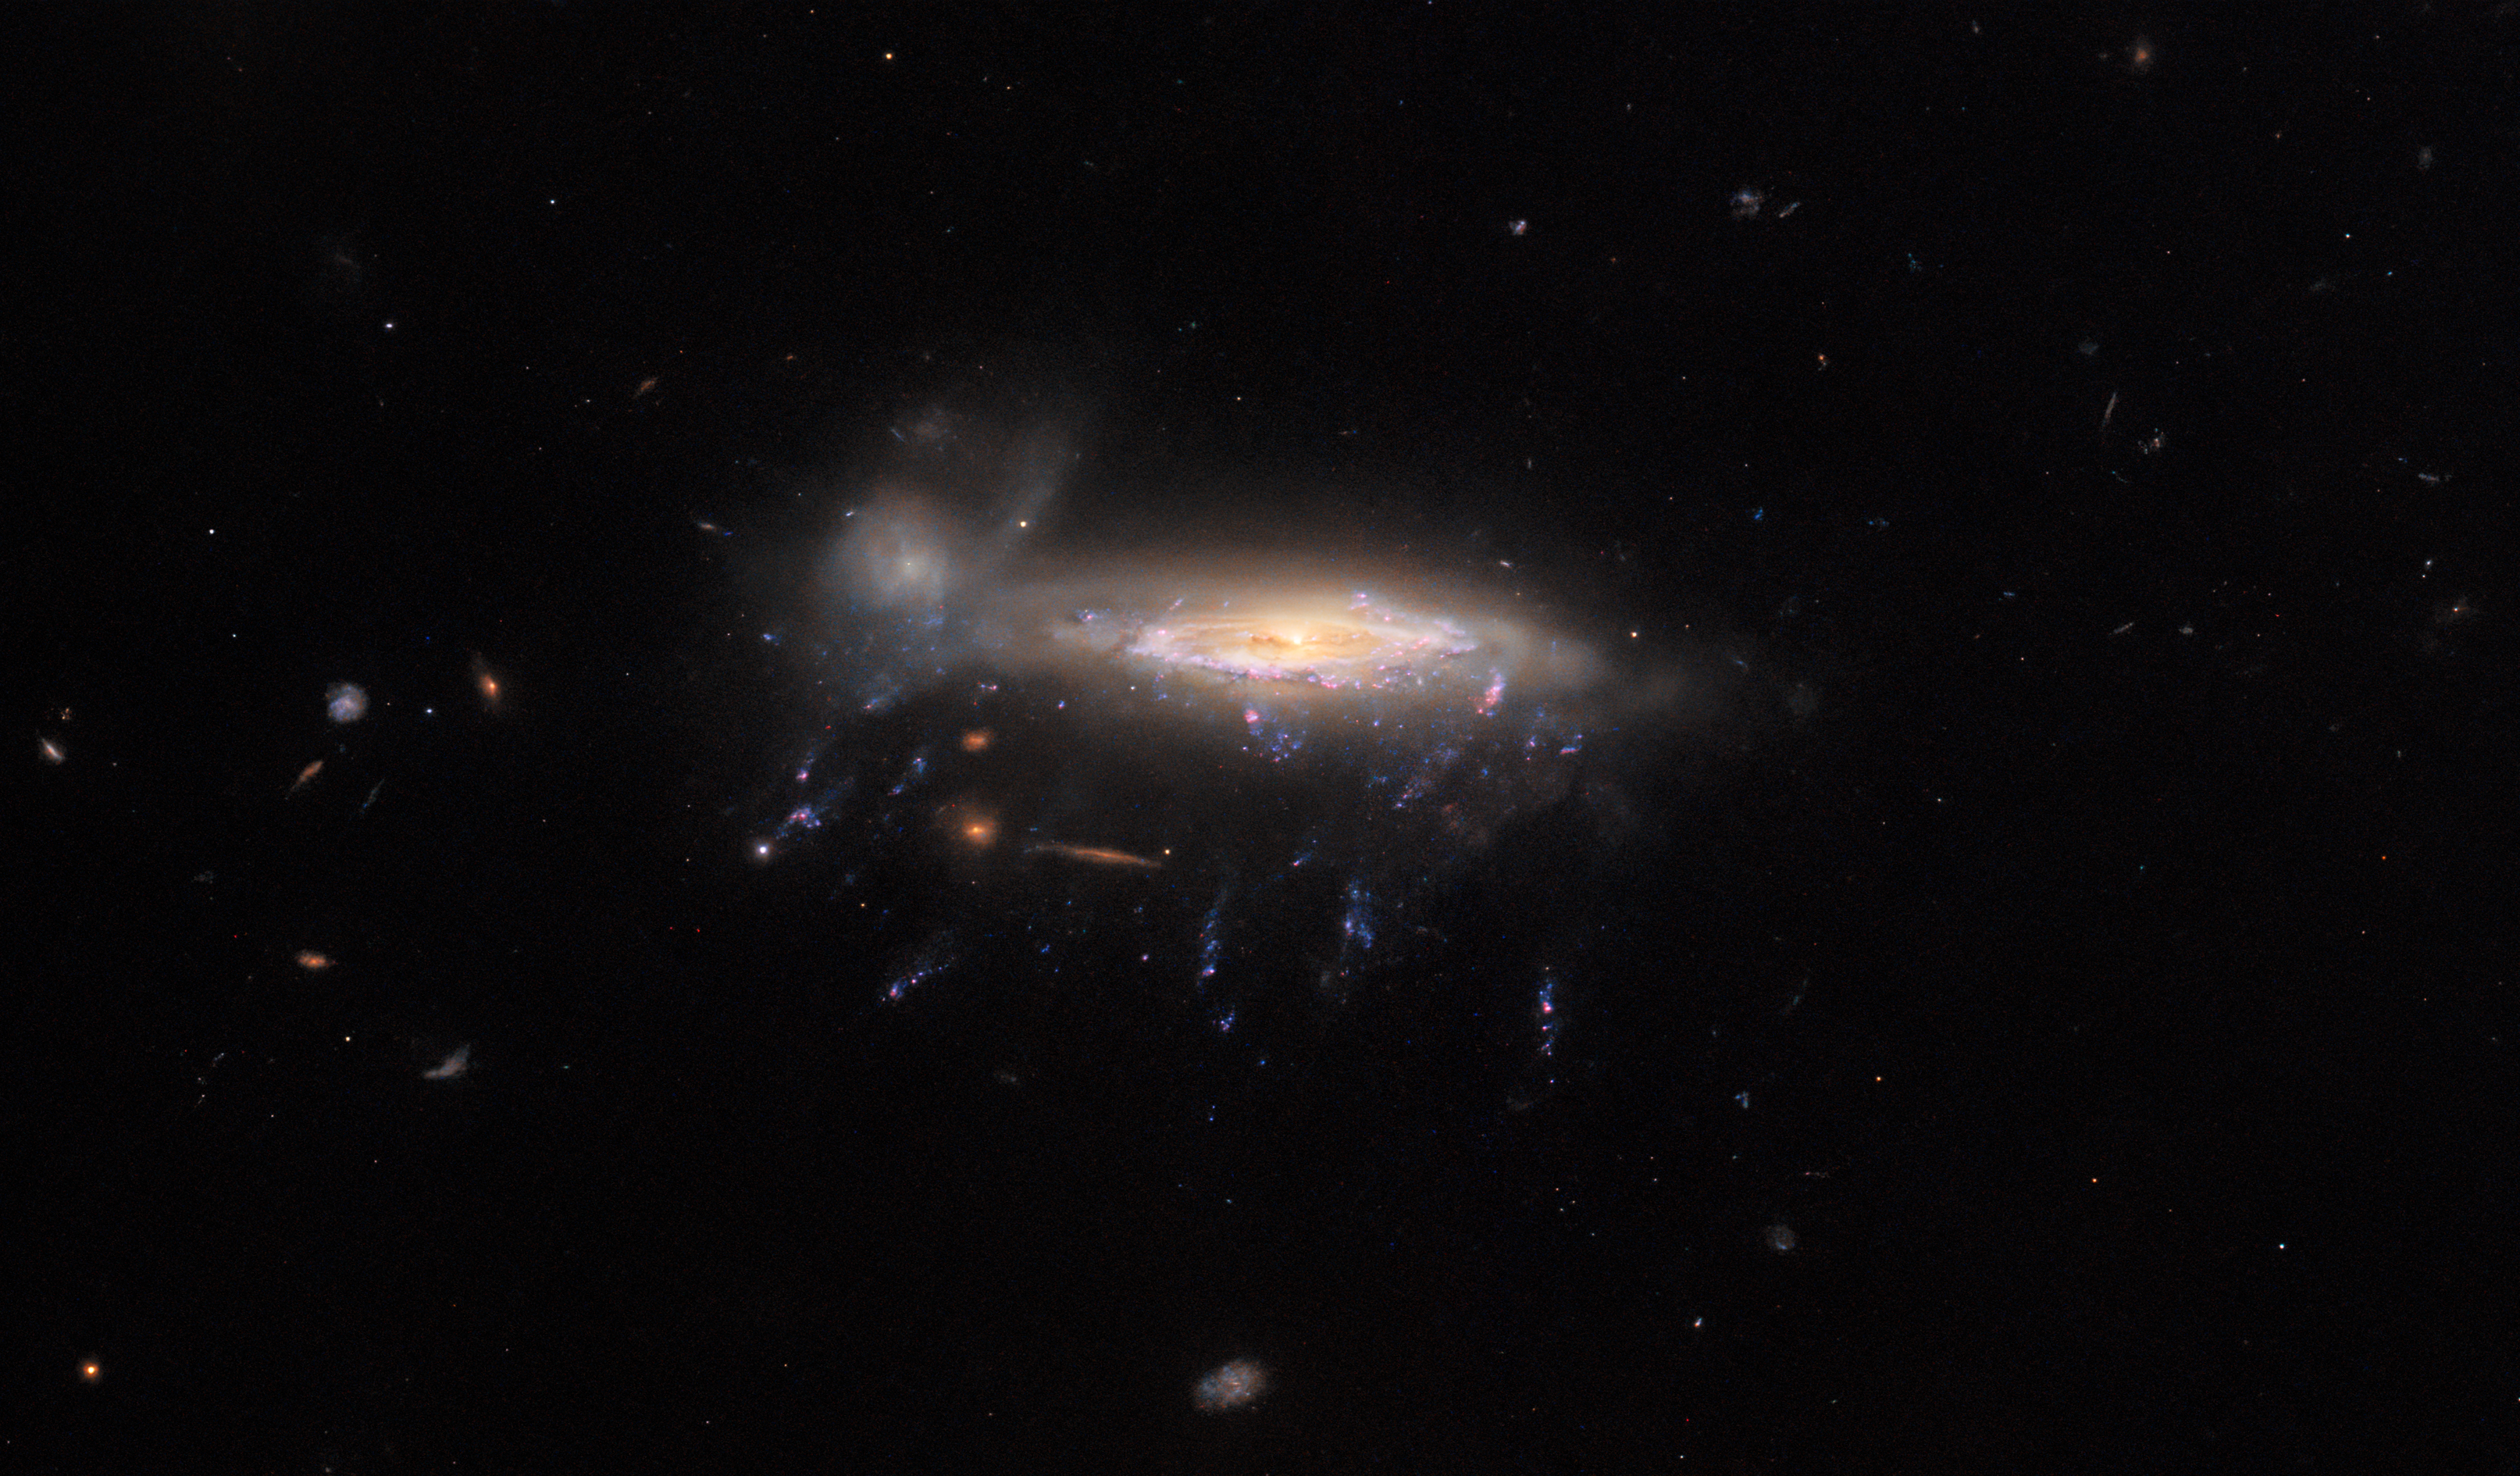

A jellyfish and the ram

Here we see JO204, a ‘jellyfish galaxy’ so named for the bright tendrils of gas that appear in this image to be drifting lazily below JO204’s bright central bulk. The galaxy lies almost 600 million light-years away in the constellation Sextans. This image was captured by the NASA/ESA Hubble Space Telescope, and it is the third of a series of Pictures of the Week featuring jellyfish galaxies. This series of images is possible thanks to a survey in which observations were made of six of these fascinating galaxies, including JO204. This survey was performed with the intention of better understanding star formation under extreme conditions.

Given the dreamy appearance of this image, it would be understandable to wonder why jellyfish galaxies should be such a crucible for star formation. The answer is that — as is often the case with astronomy — first appearances can be deceiving. Whilst the delicate ribbons of gas beneath JO204 may look like floating jellyfish tentacles, they are in fact the outcome of an intense astronomical process known as ram pressure stripping.

Ram pressure is a particular type of pressure exerted on a body when it moves relative to a fluid. An intuitive example is the sensation of pressure you experience when you are standing in an intense gust of wind — the wind is a moving fluid, and your body feels pressure from it. An extension of this analogy is that your body will remain whole and coherent, but the more loosely bound things — like your hair and your clothes — will flap in the wind. The same is true for jellyfish galaxies. They experience ram pressure because of their movement against the intergalactic medium that fills the spaces between galaxies in a galaxy cluster. The galaxies experience intense pressure from that movement, and as a result their more loosely bound gas is stripped away. This gas is mostly the colder and denser gas in the galaxy — gas which, when stirred and compressed by the ram pressure, collapses and forms new stars in the jellyfish’s beautiful tendrils.

Credit: ESA/Hubble & NASA, M. Gullieuszik and the GASP team